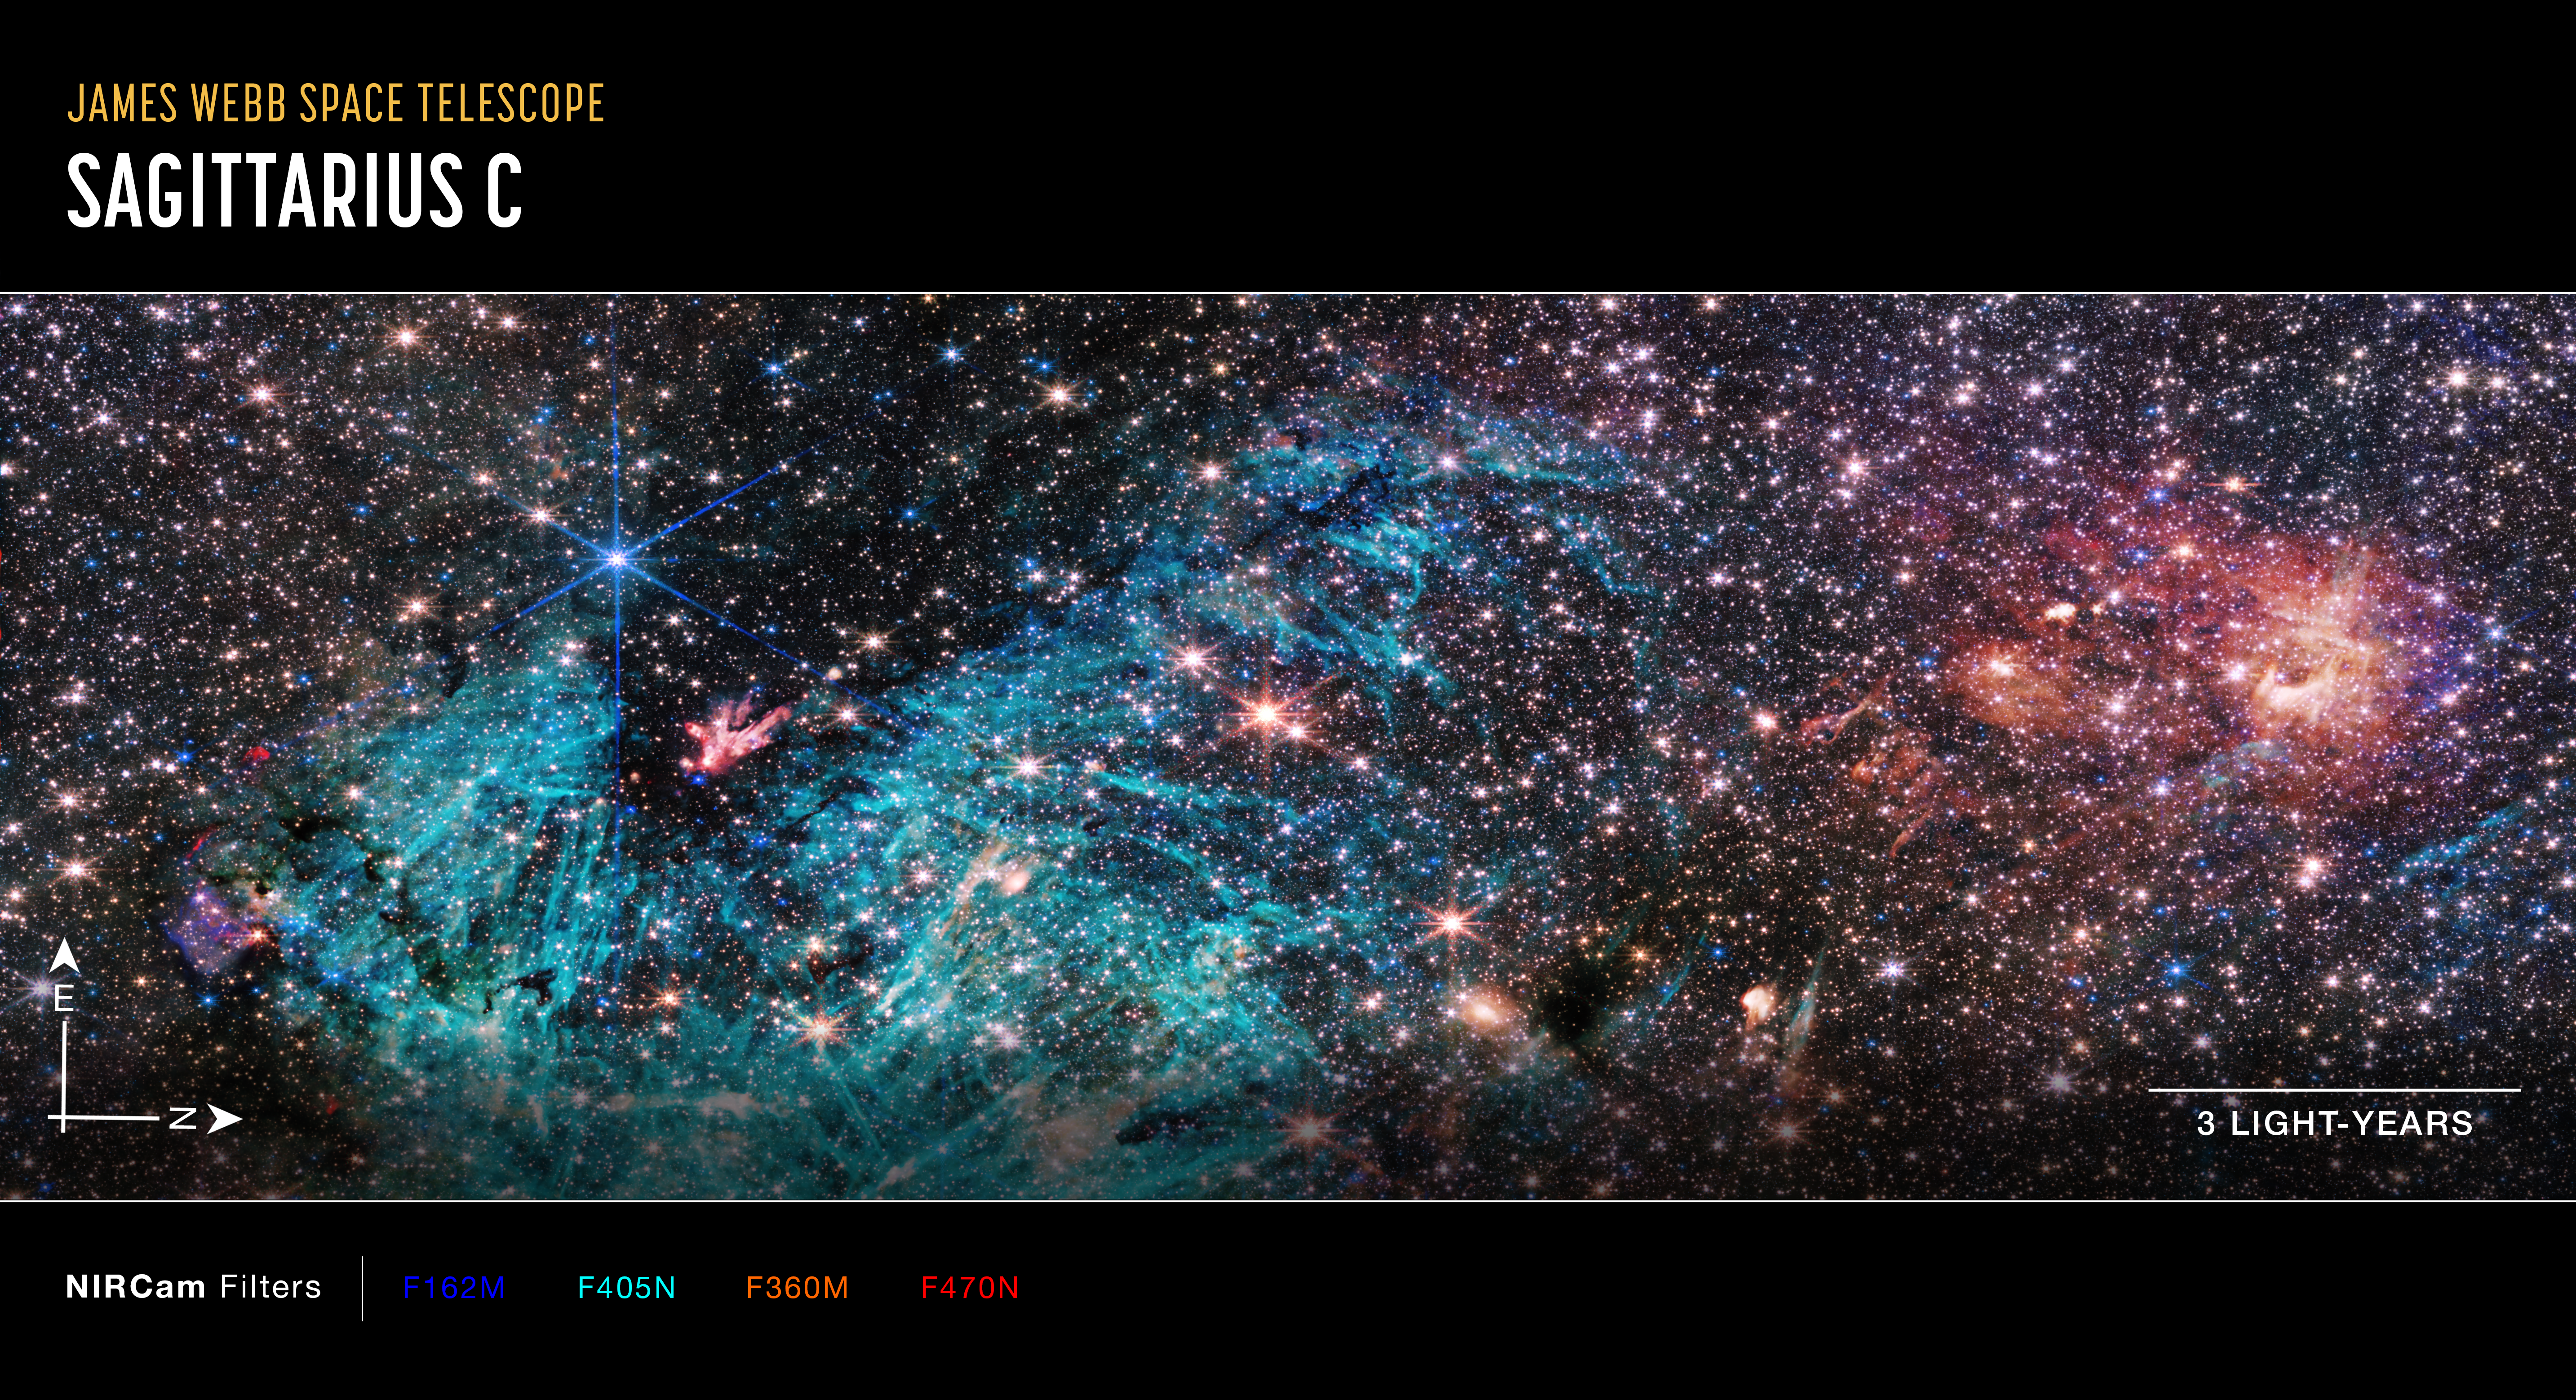

Sagittarius C (NIRCam Image, annotated)

This image of Sagittarius C (Sgr), captured by Webb’s Near-Infrared Camera (NIRCam), shows compass arrows, scale bar, and colour key for reference.

The north and east compass arrows show the orientation of the image on the sky. Note that the relationship between north and east on the sky (as seen from below) is flipped relative to direction arrows on a map of the ground (as seen from above).

The scale bar is labelled in light-years, which is the distance that light travels in one Earth-year. (It takes 3 years for light to travel a distance equal to the length of the scale bar.) One light-year is equal to about 5.88 trillion miles or 9.46 trillion kilometres. The field of view shown in this image is approximately 50 light-years long.

This image shows invisible near-infrared wavelengths of light that have been translated into visible-light colours. The colour key shows which NIRCam filters were used when collecting the light. The colour of each filter name is the visible light colour used to represent the infrared light that passes through that filter.

Credit: NASA, ESA, CSA, STScI, S. Crowe (UVA)